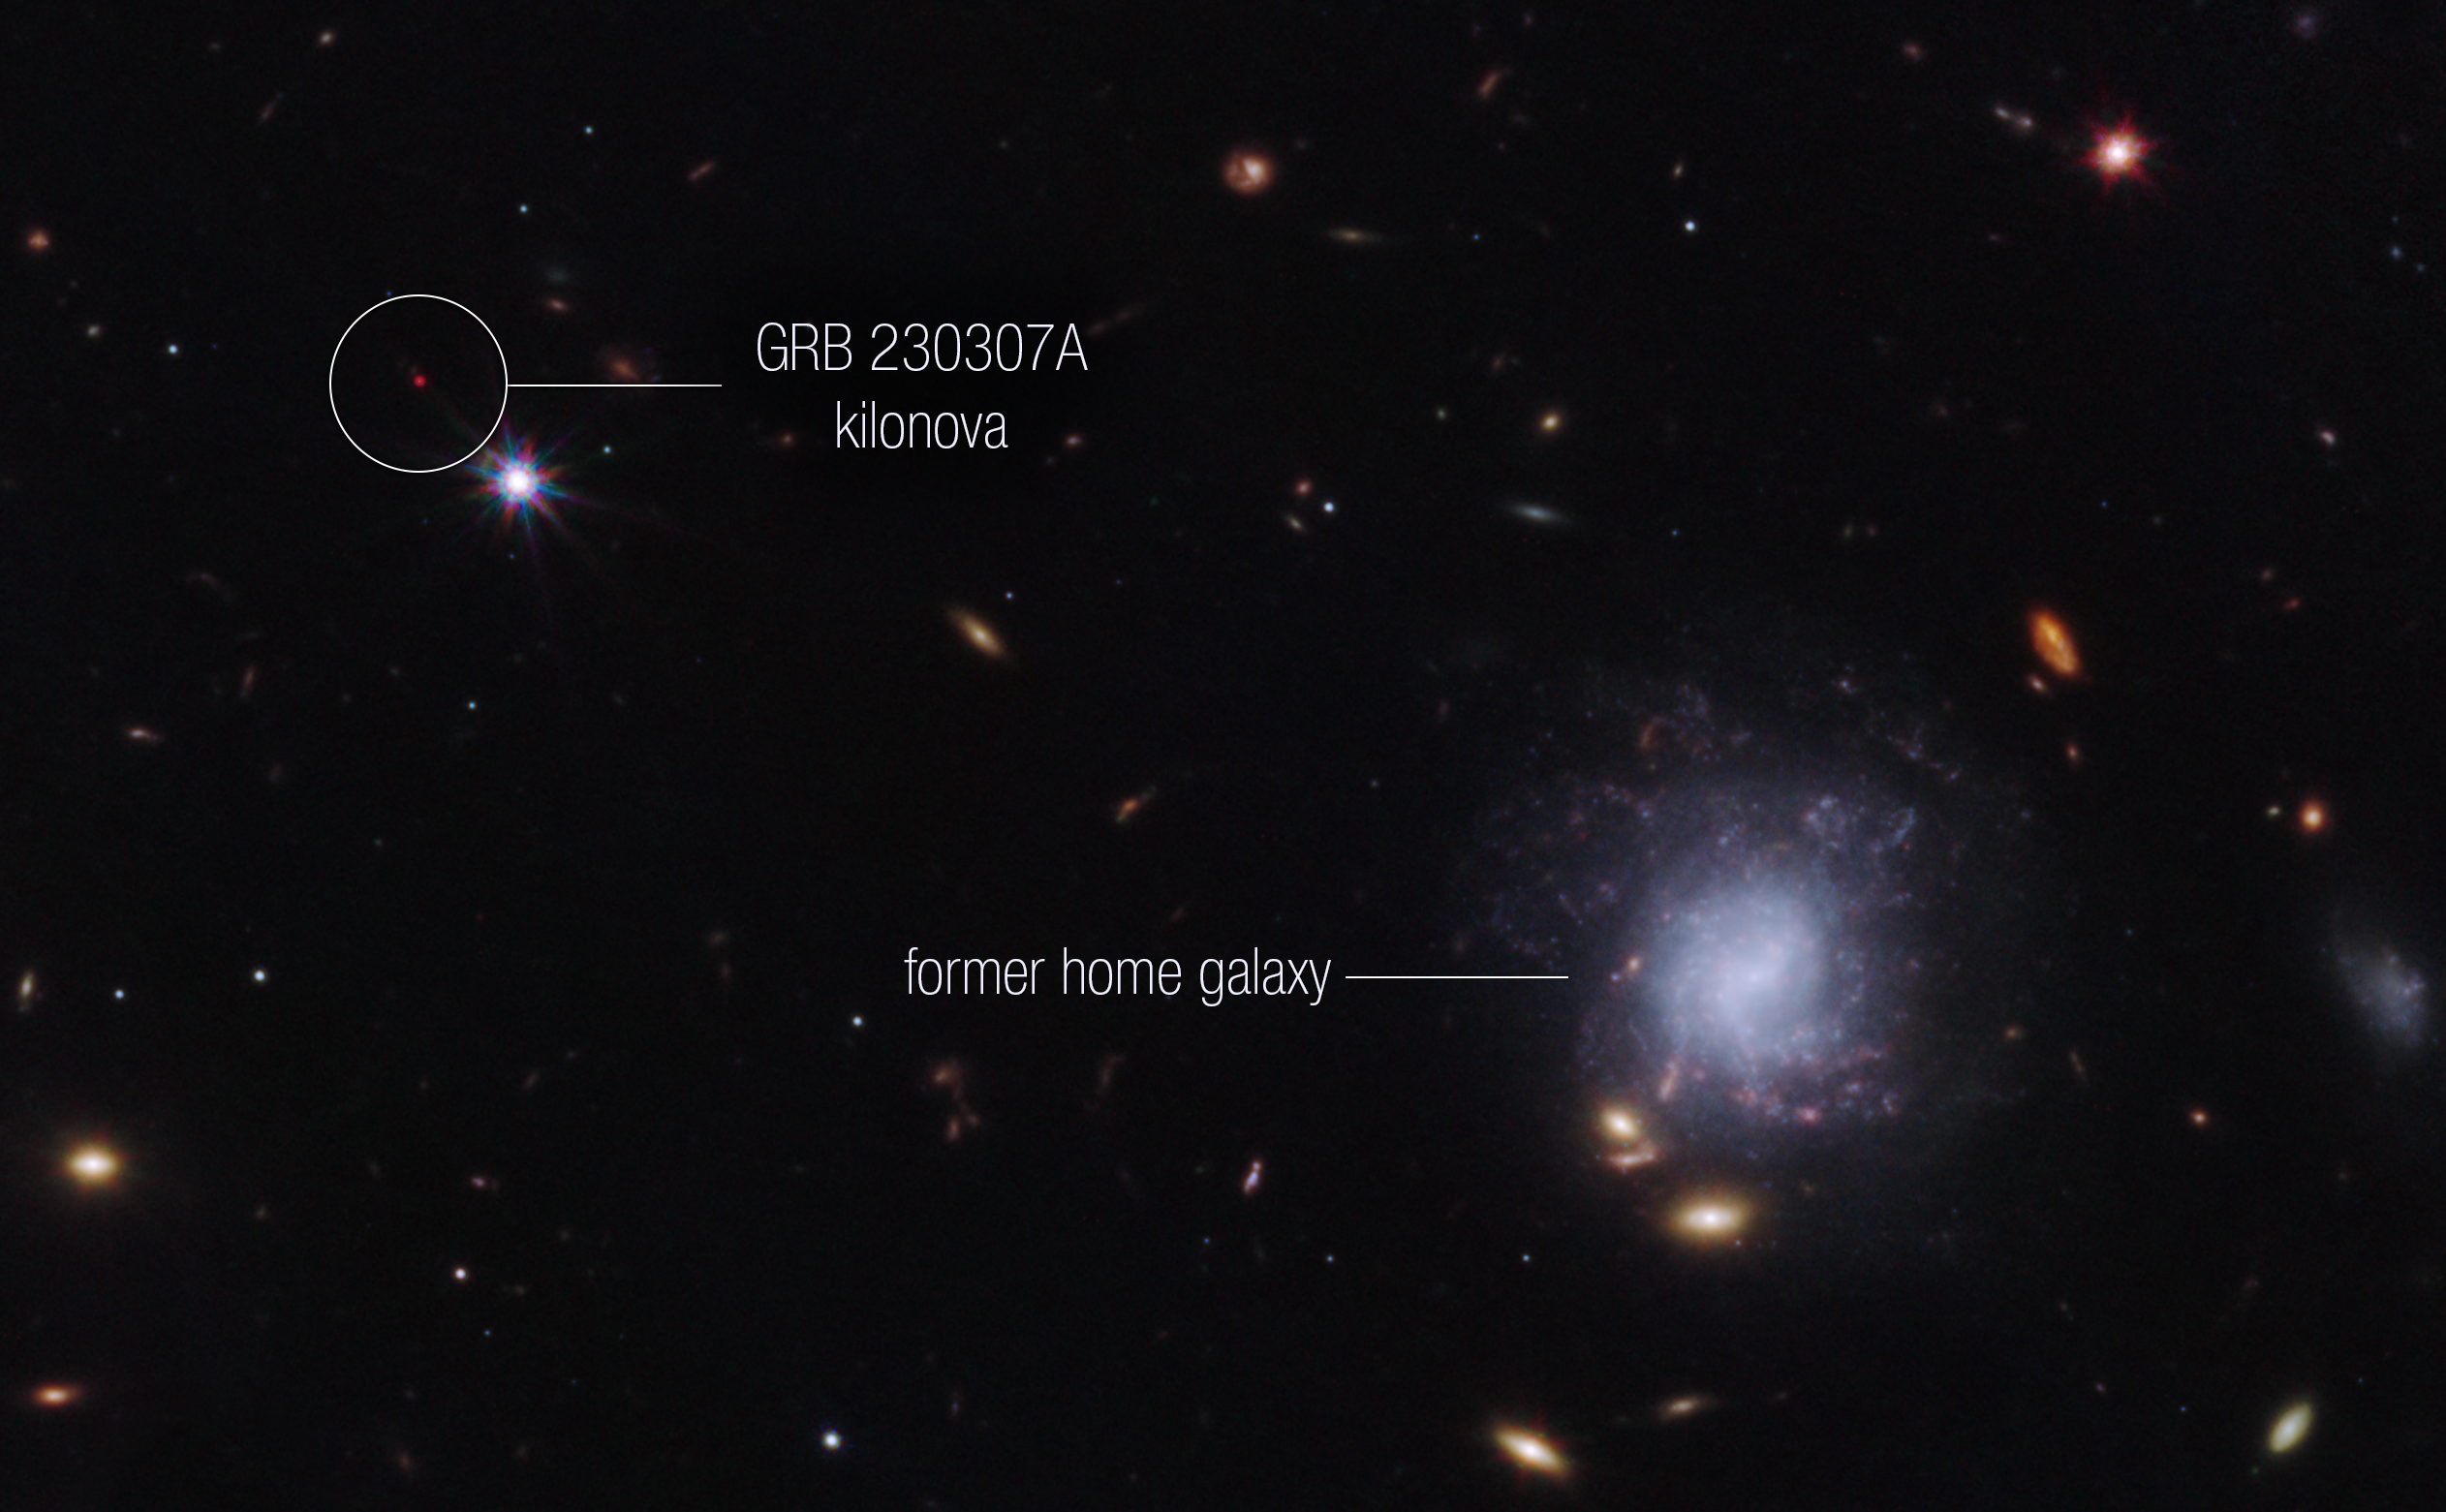

Kilonova and host galaxy

A team of scientists has used the NASA/ESA/CSA James Webb Space Telescope to observe an exceptionally bright gamma-ray burst, GRB 230307A, and its associated kilonova. Kilonovas—an explosion produced by a neutron star merging with either a black hole or with another neutron star—are extremely rare, making it difficult to observe these events. The highly sensitive infrared capabilities of Webb helped scientists identify the home address of the two neutron stars that created the kilonova.

This image from Webb’s NIRCam (Near-Infrared Camera) instrument highlights GRB 230307A’s kilonova and its former home galaxy among their local environment of other galaxies and foreground stars. The neutron stars were kicked out of their home galaxy and travelled the distance of about 120,000 light-years, approximately the diameter of the Milky Way galaxy, before finally merging several hundred million years later.

This image is a composite of separate exposures acquired by the James Webb Space Telescope using the NIRCam instrument. Several filters were used to sample wide wavelength ranges. The colour results from assigning different hues (colours) to each monochromatic (grayscale) image associated with an individual filter. In this case, the assigned colours are: Blue: F115W + F150W Green: F277W Red: F356W + F444W

Credit: NASA, ESA, CSA, STScI, A. Levan (IMAPP, Warw), A. Pagan (STScI)